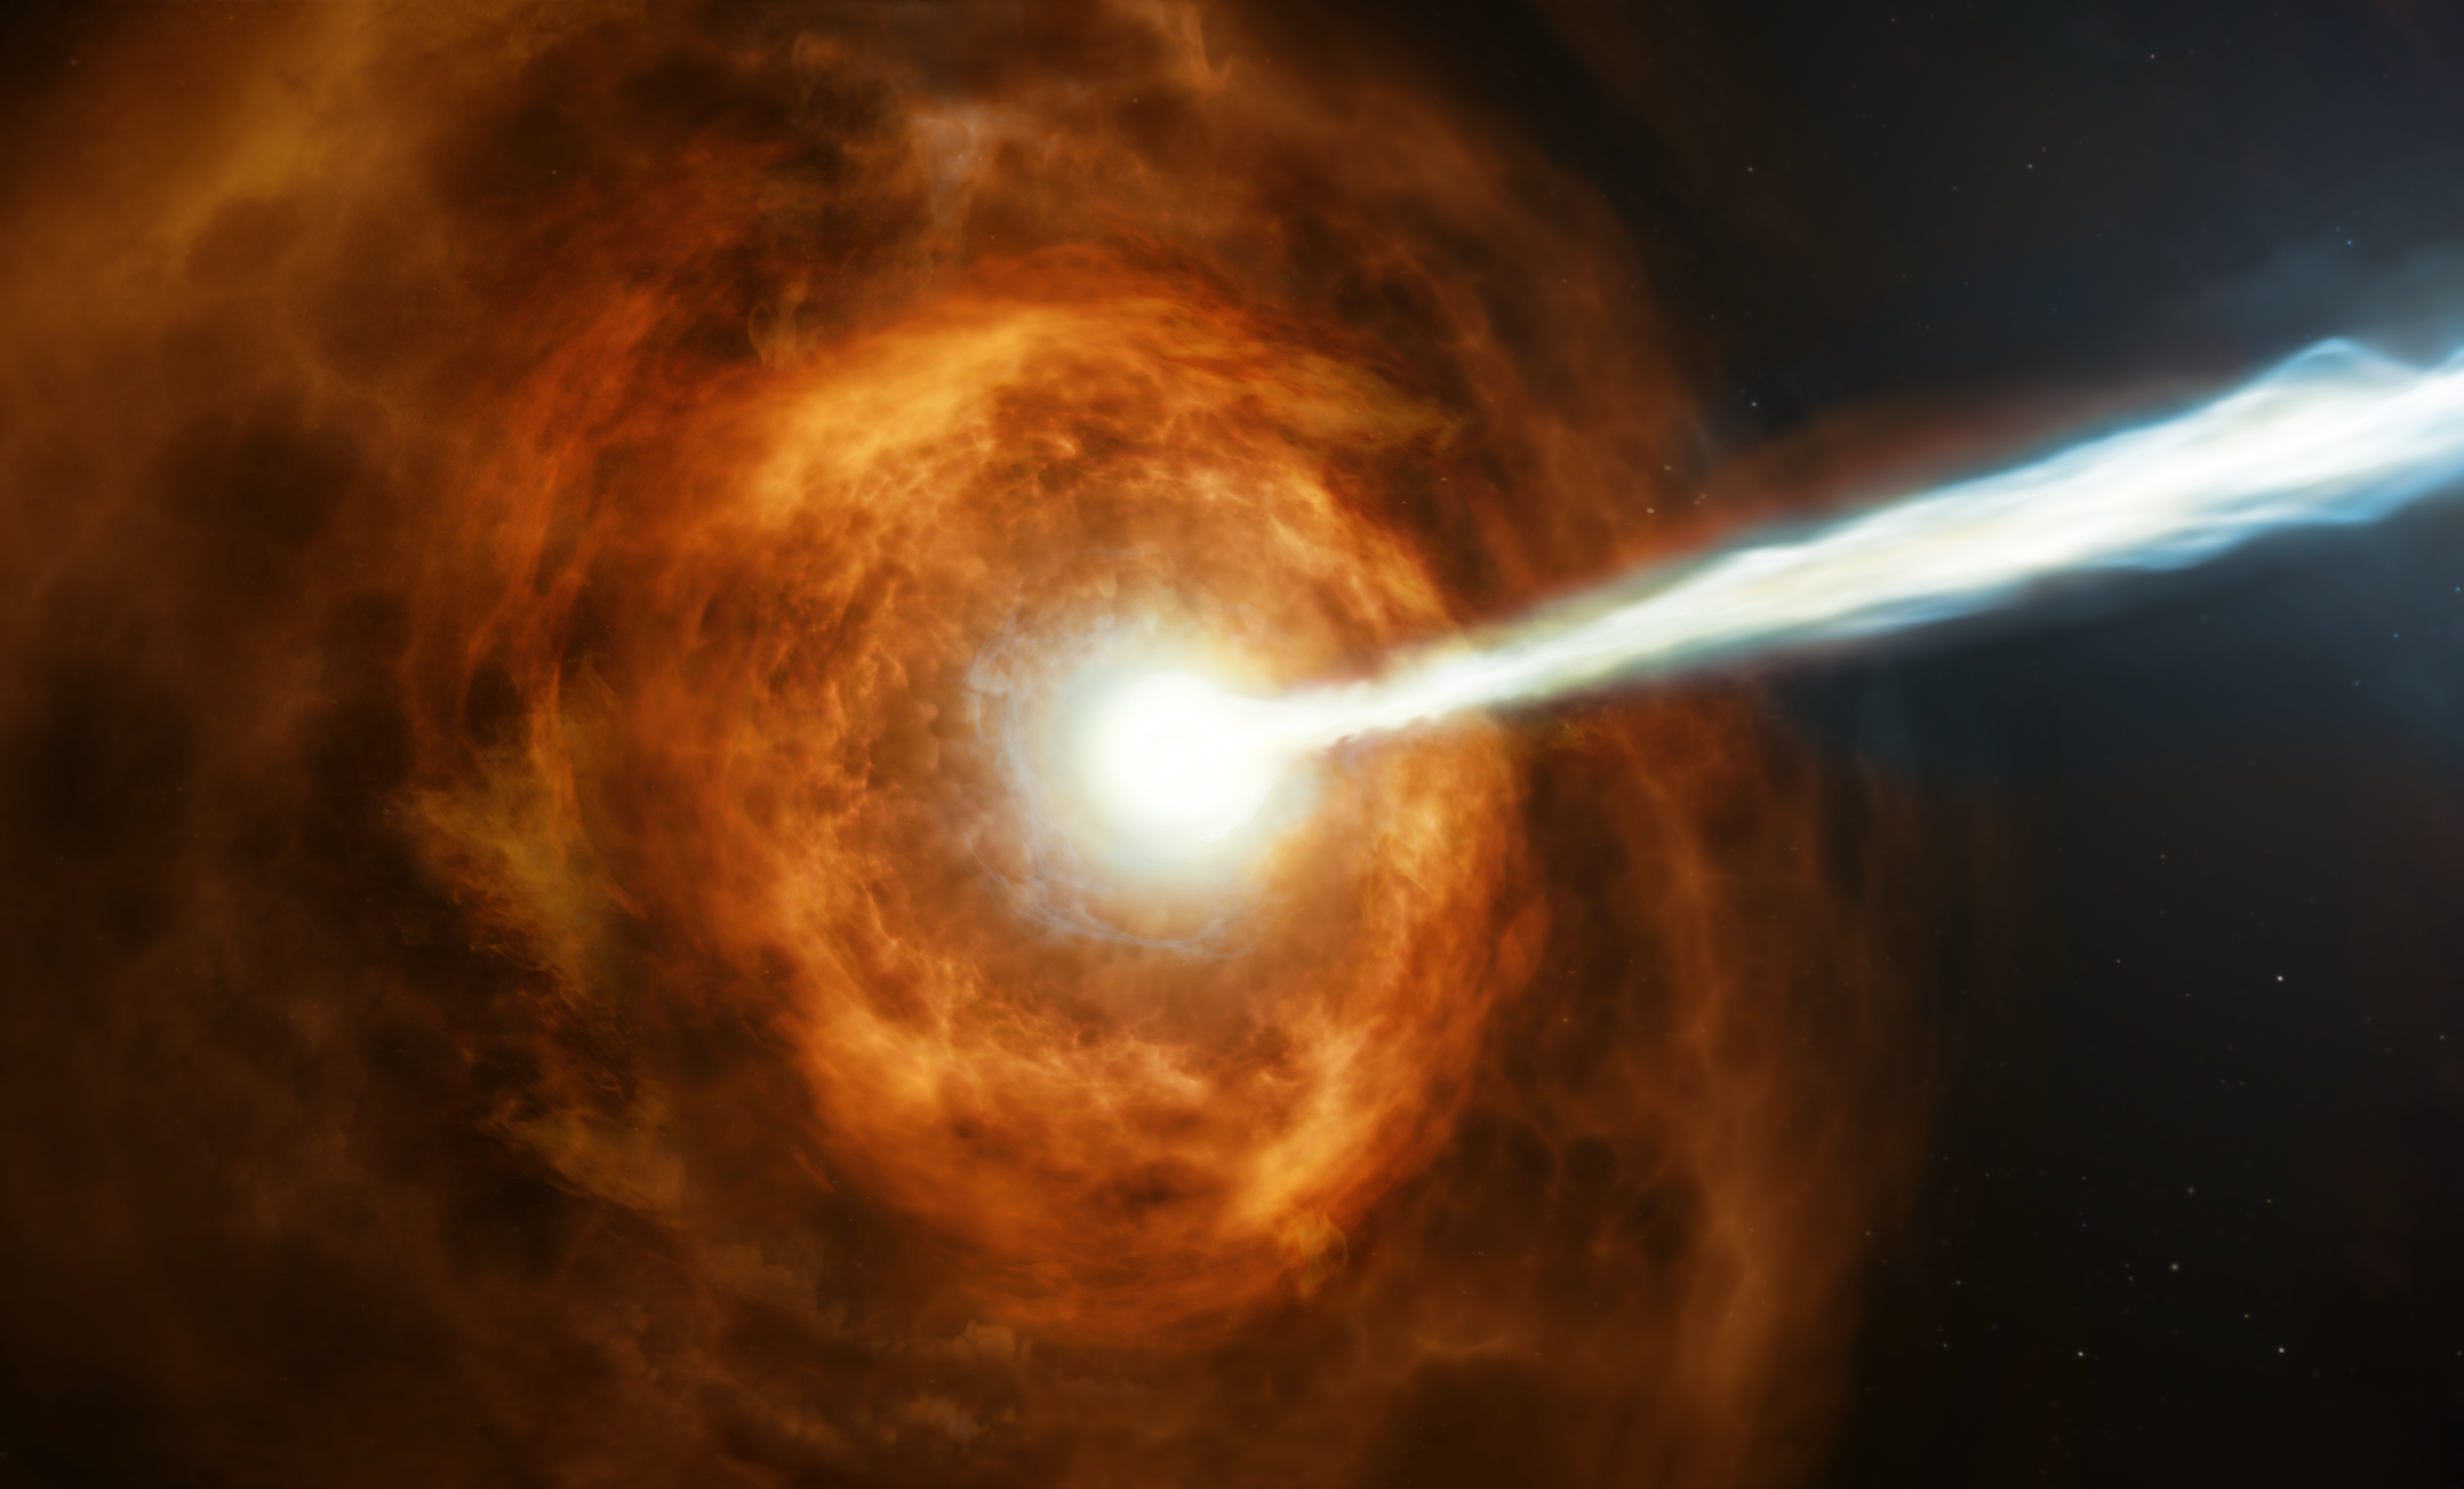

GRB 190114C (Artist’s Impression)

New observations from the NASA/ESA Hubble Space Telescope have investigated the nature of the powerful gamma-ray burst GRB 190114C by studying its environment.

Gamma-ray bursts are the most powerful explosions in the Universe. They emit most of their energy in gamma rays, light which is much more energetic than the visible light we can see with our eyes.

Hubble’s observations suggest that this particular burst displayed such powerful emission because the collapsing star was sitting in a very dense environment, right in the middle of a bright galaxy 5 billion light years away.

Credit: ESA/Hubble, M. Kornmesser